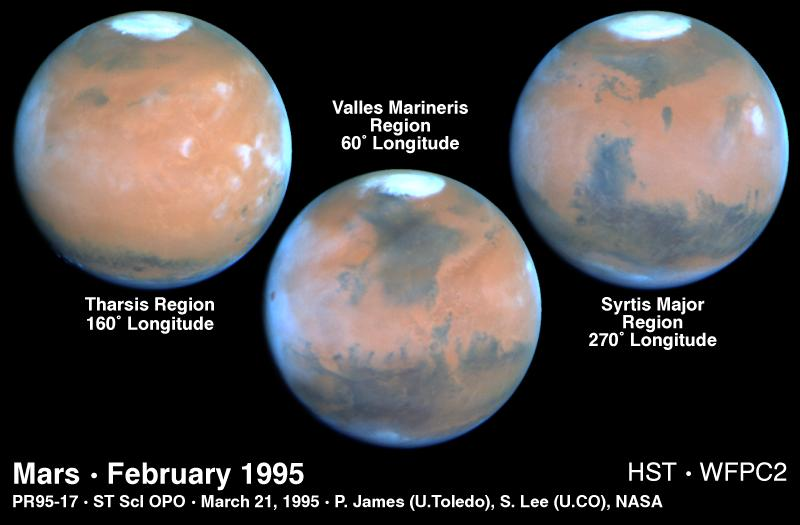

Mars at Opposition 1995

These Hubble Space Telescope views provide the most detailed complete global coverage of the red planet Mars ever seen from Earth. The pictures were taken on February 25, 1995, when Mars was at a distance of 65 million miles (103 million km).

Credit: Philip James (University of Toledo), Steven Lee (University of Colorado), NASA/ESA